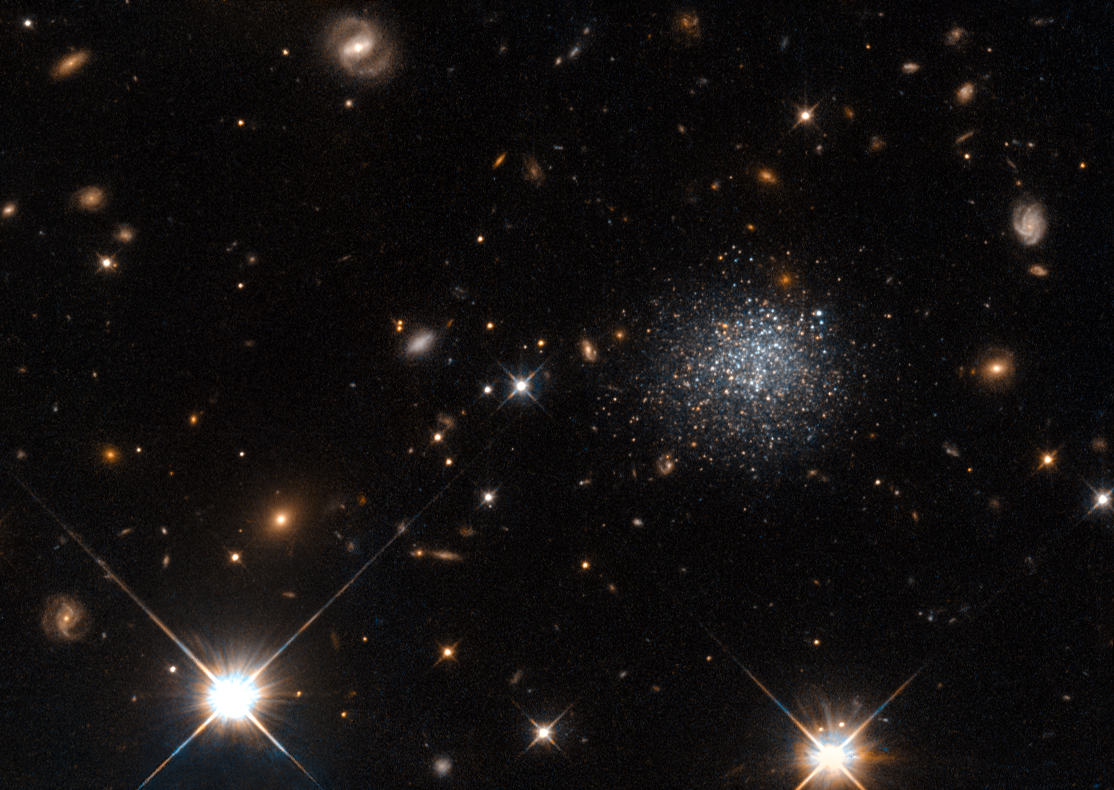

A stubborn dwarf galaxy

The fuzzy collection of stars seen in this NASA/ESA Hubble Space Telescope image forms an intriguing dwarf galaxy named LEDA 677373, located about 14 million light-years away from us.

Dwarf galaxies are small, faint collections of stars and gas. Their diverse properties make them intriguing objects to astronomers, but their small size means that we can only explore those that lie relatively close to us, such as LEDA 677373.

This particular dwarf galaxy contains a plentiful reservoir of gas from which it could form stars. However, it stubbornly refuses to do so. In a bid to find out why, Hubble imaged the galaxy’s individual stars at different wavelengths, a method that allows astronomers to figure out a star’s age. These observations showed that the galaxy has been around for at least six billion years — plenty of time to form stars. So why has it not done so?

Rather than being stubborn, LEDA 677373 seems to have been the unfortunate victim of a cosmic crime. A nearby giant spiral galaxy, Messier 83, seems to be stealing gas from the dwarf galaxy, stopping new stars from being born.

Editor's note (May 2025): The location of LEDA 677373 was corrected.

Credit: ESA/Hubble & NASA